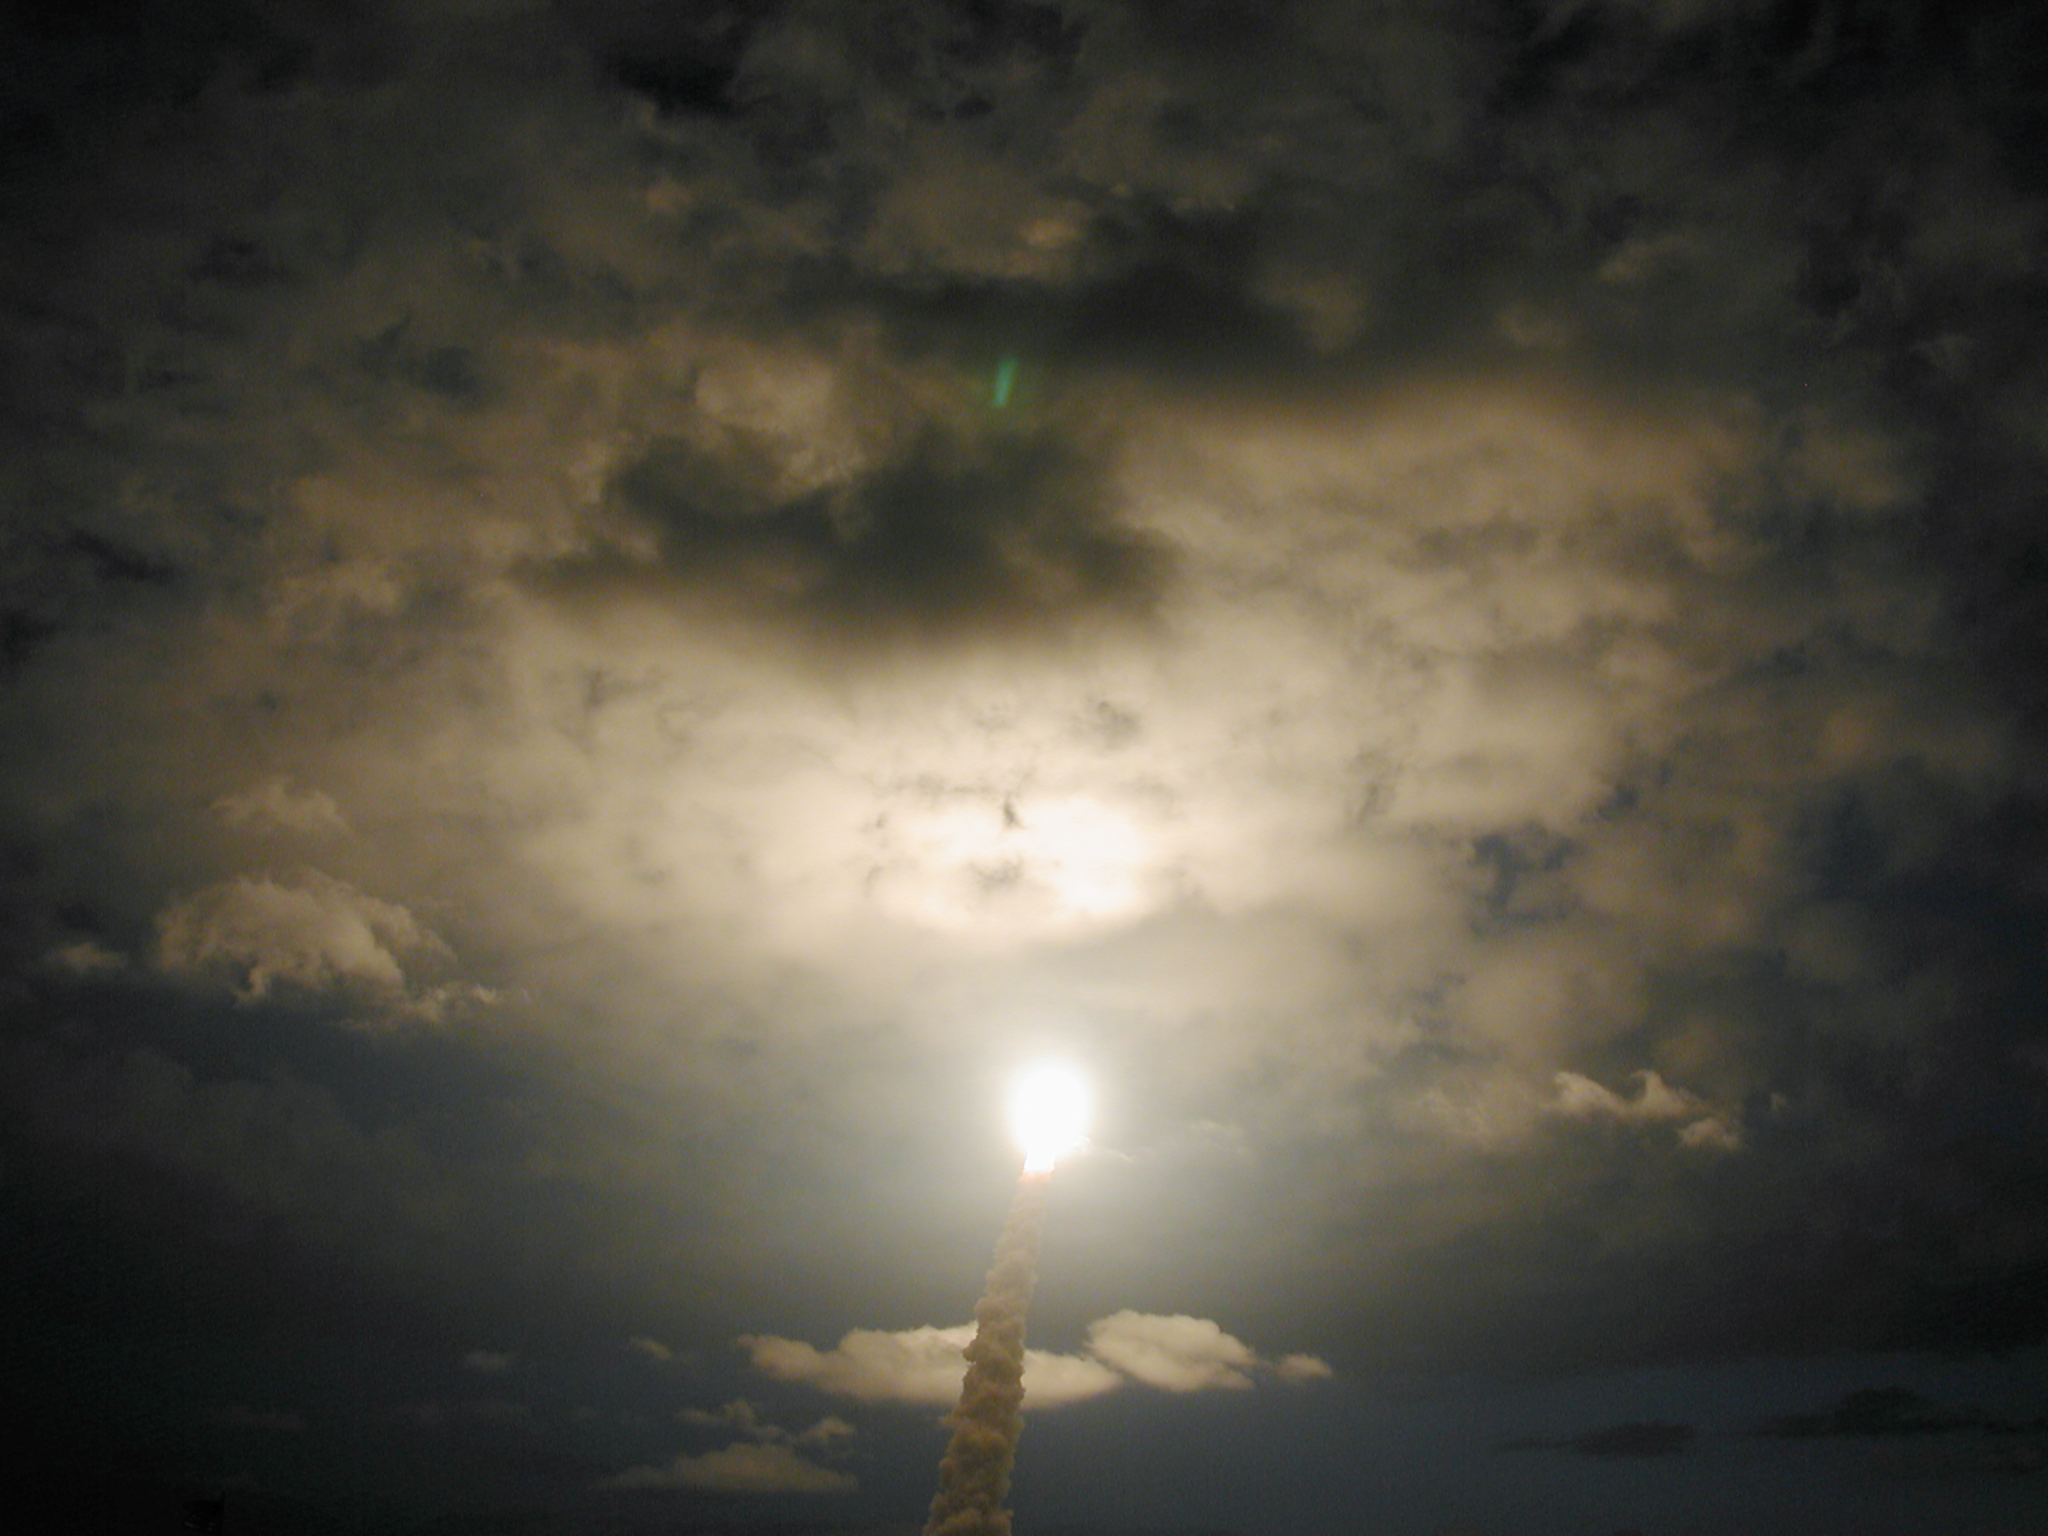

SM3B - Space Shuttle Colombia passes through a clearing in the clouds

Space Shuttle Colombia as it heads towards Hubble for the fourth servicing mission (3B). Colombia was launched at 11:22 UT on 1 March 2002.

Credit: ESA 2002. Photo by Lars Lindberg Christensen